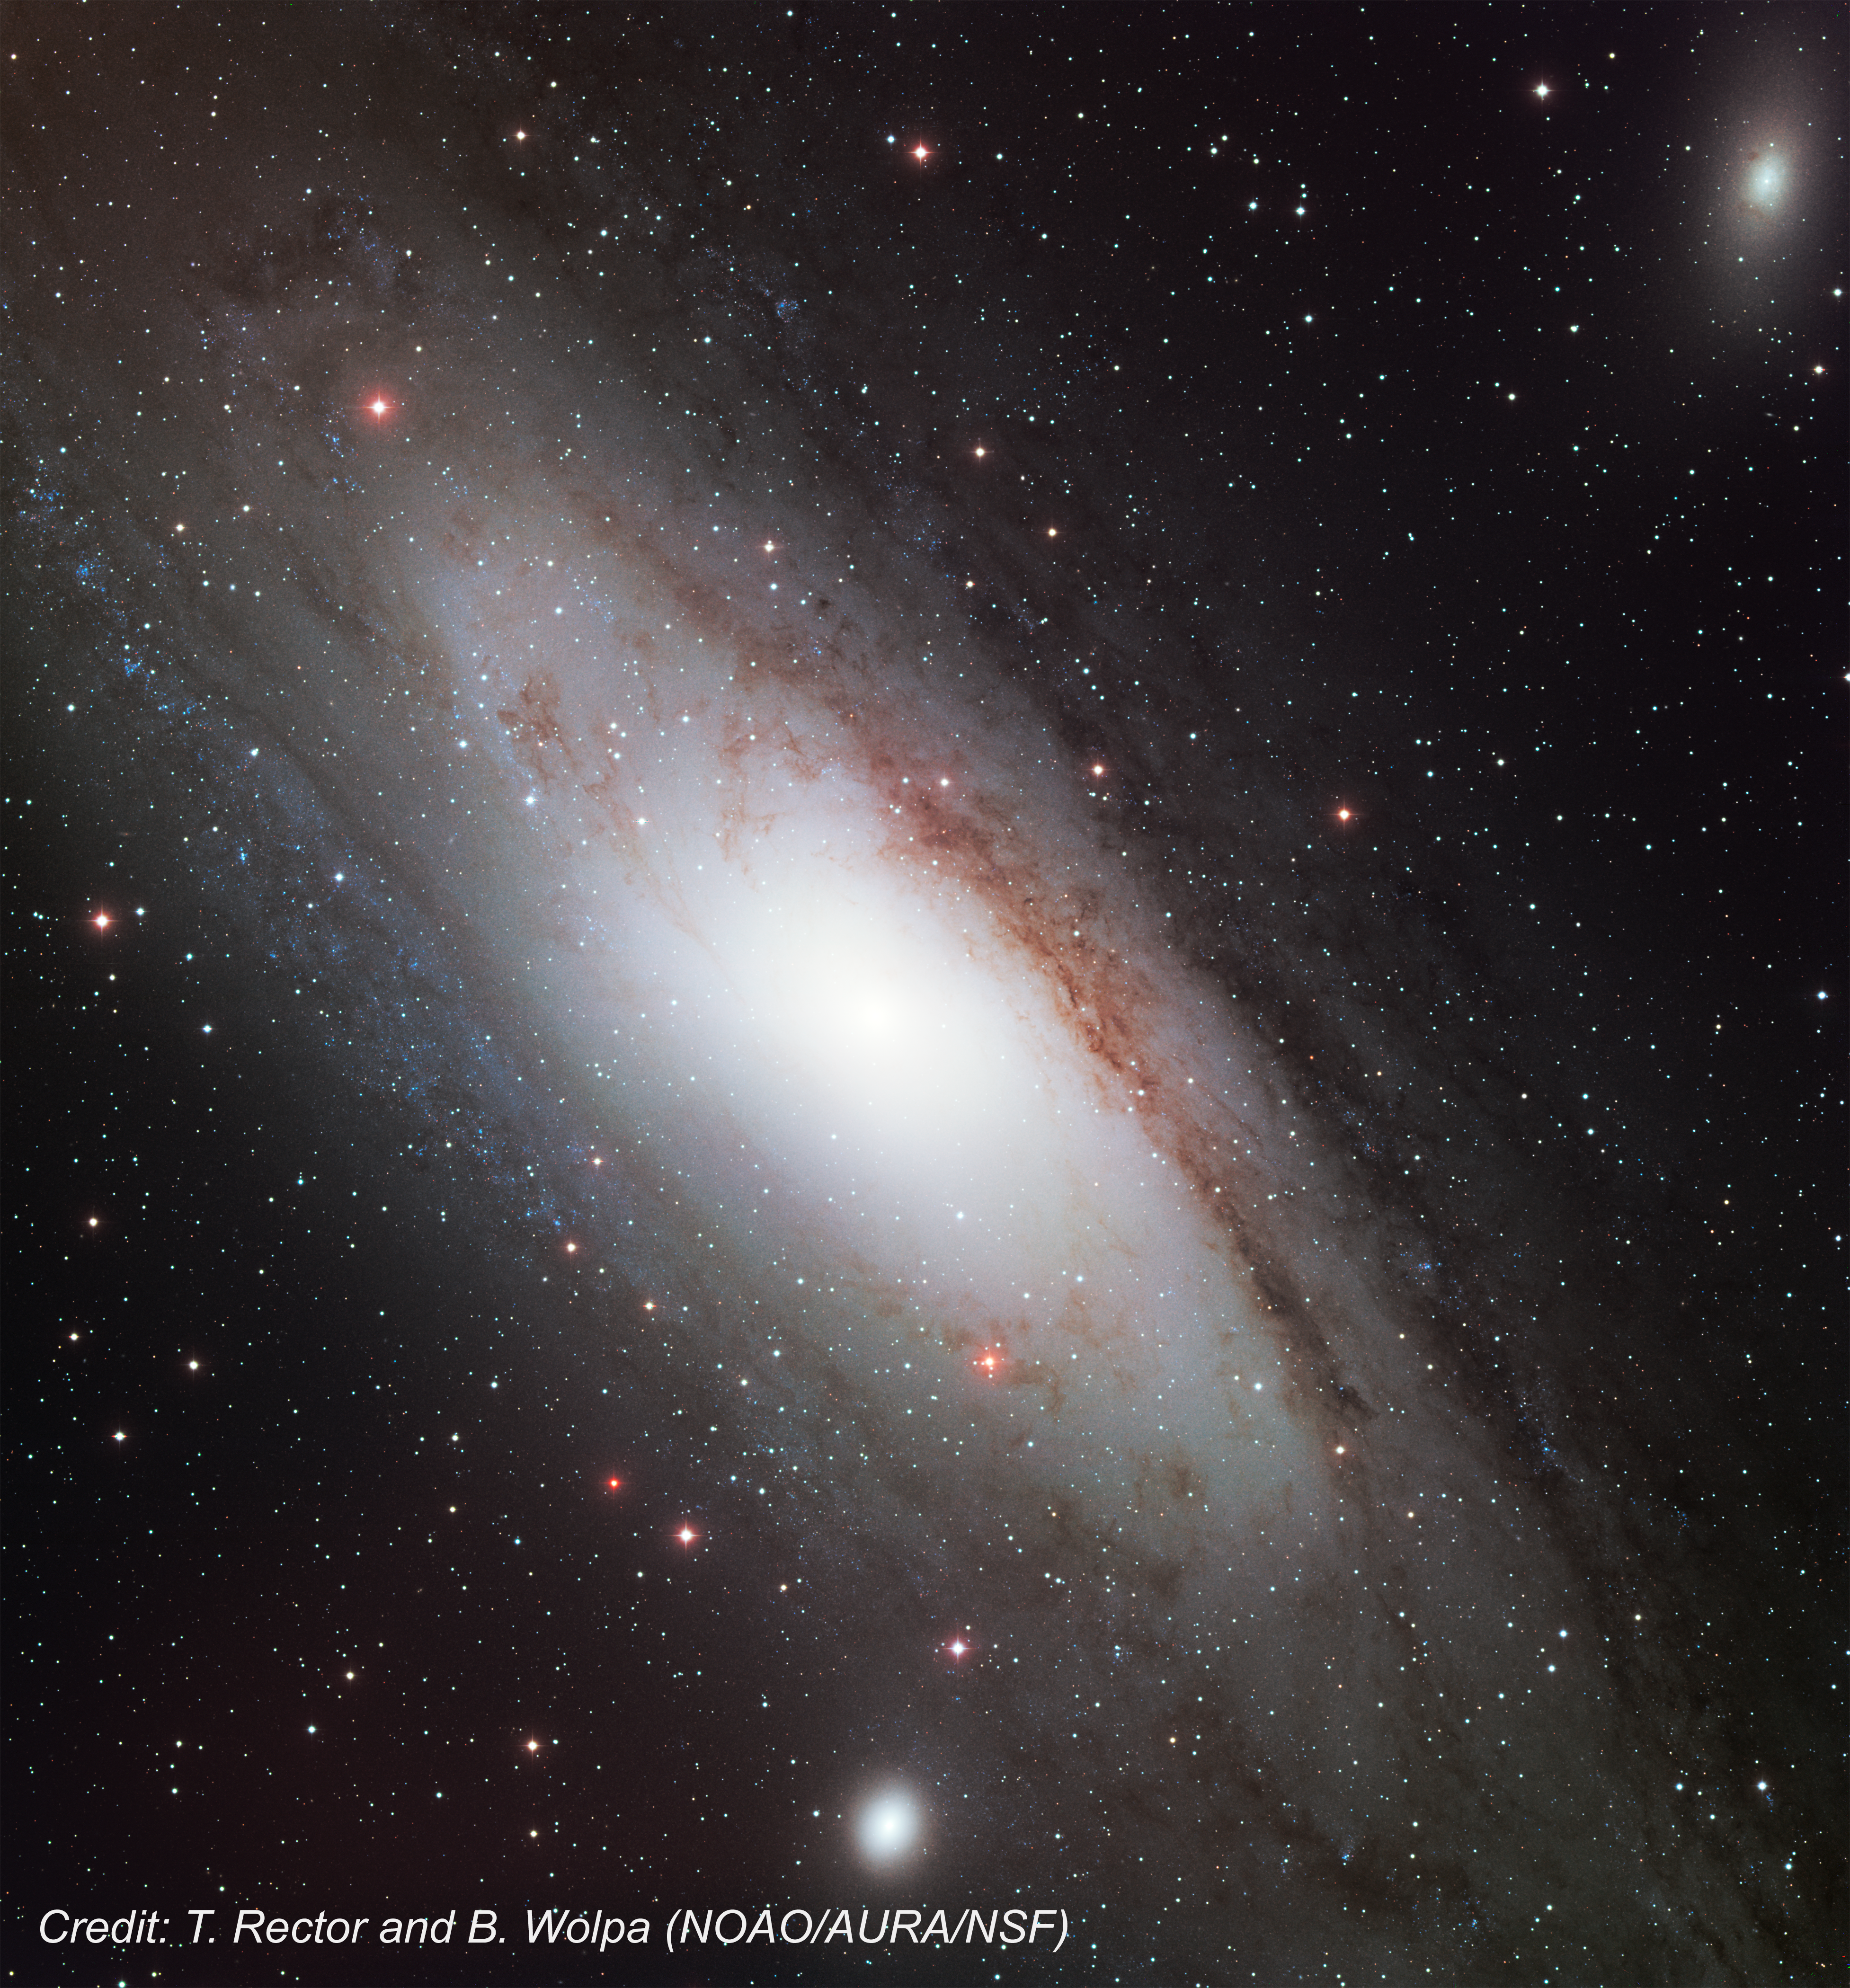

Ground-based image of Andromeda Galaxy, M31

This image of the Andromeda galaxy was taken on 13 January 2001, with the WIYN/KPNO 0.9-metre Mosaic I by T. Rector and B. Wolpa of the National Optical Astronomy Observatory in Tucson, Arizona (USA).

Credit: T. Rector and B. Wolpa (NOAO/AURA/NSF)